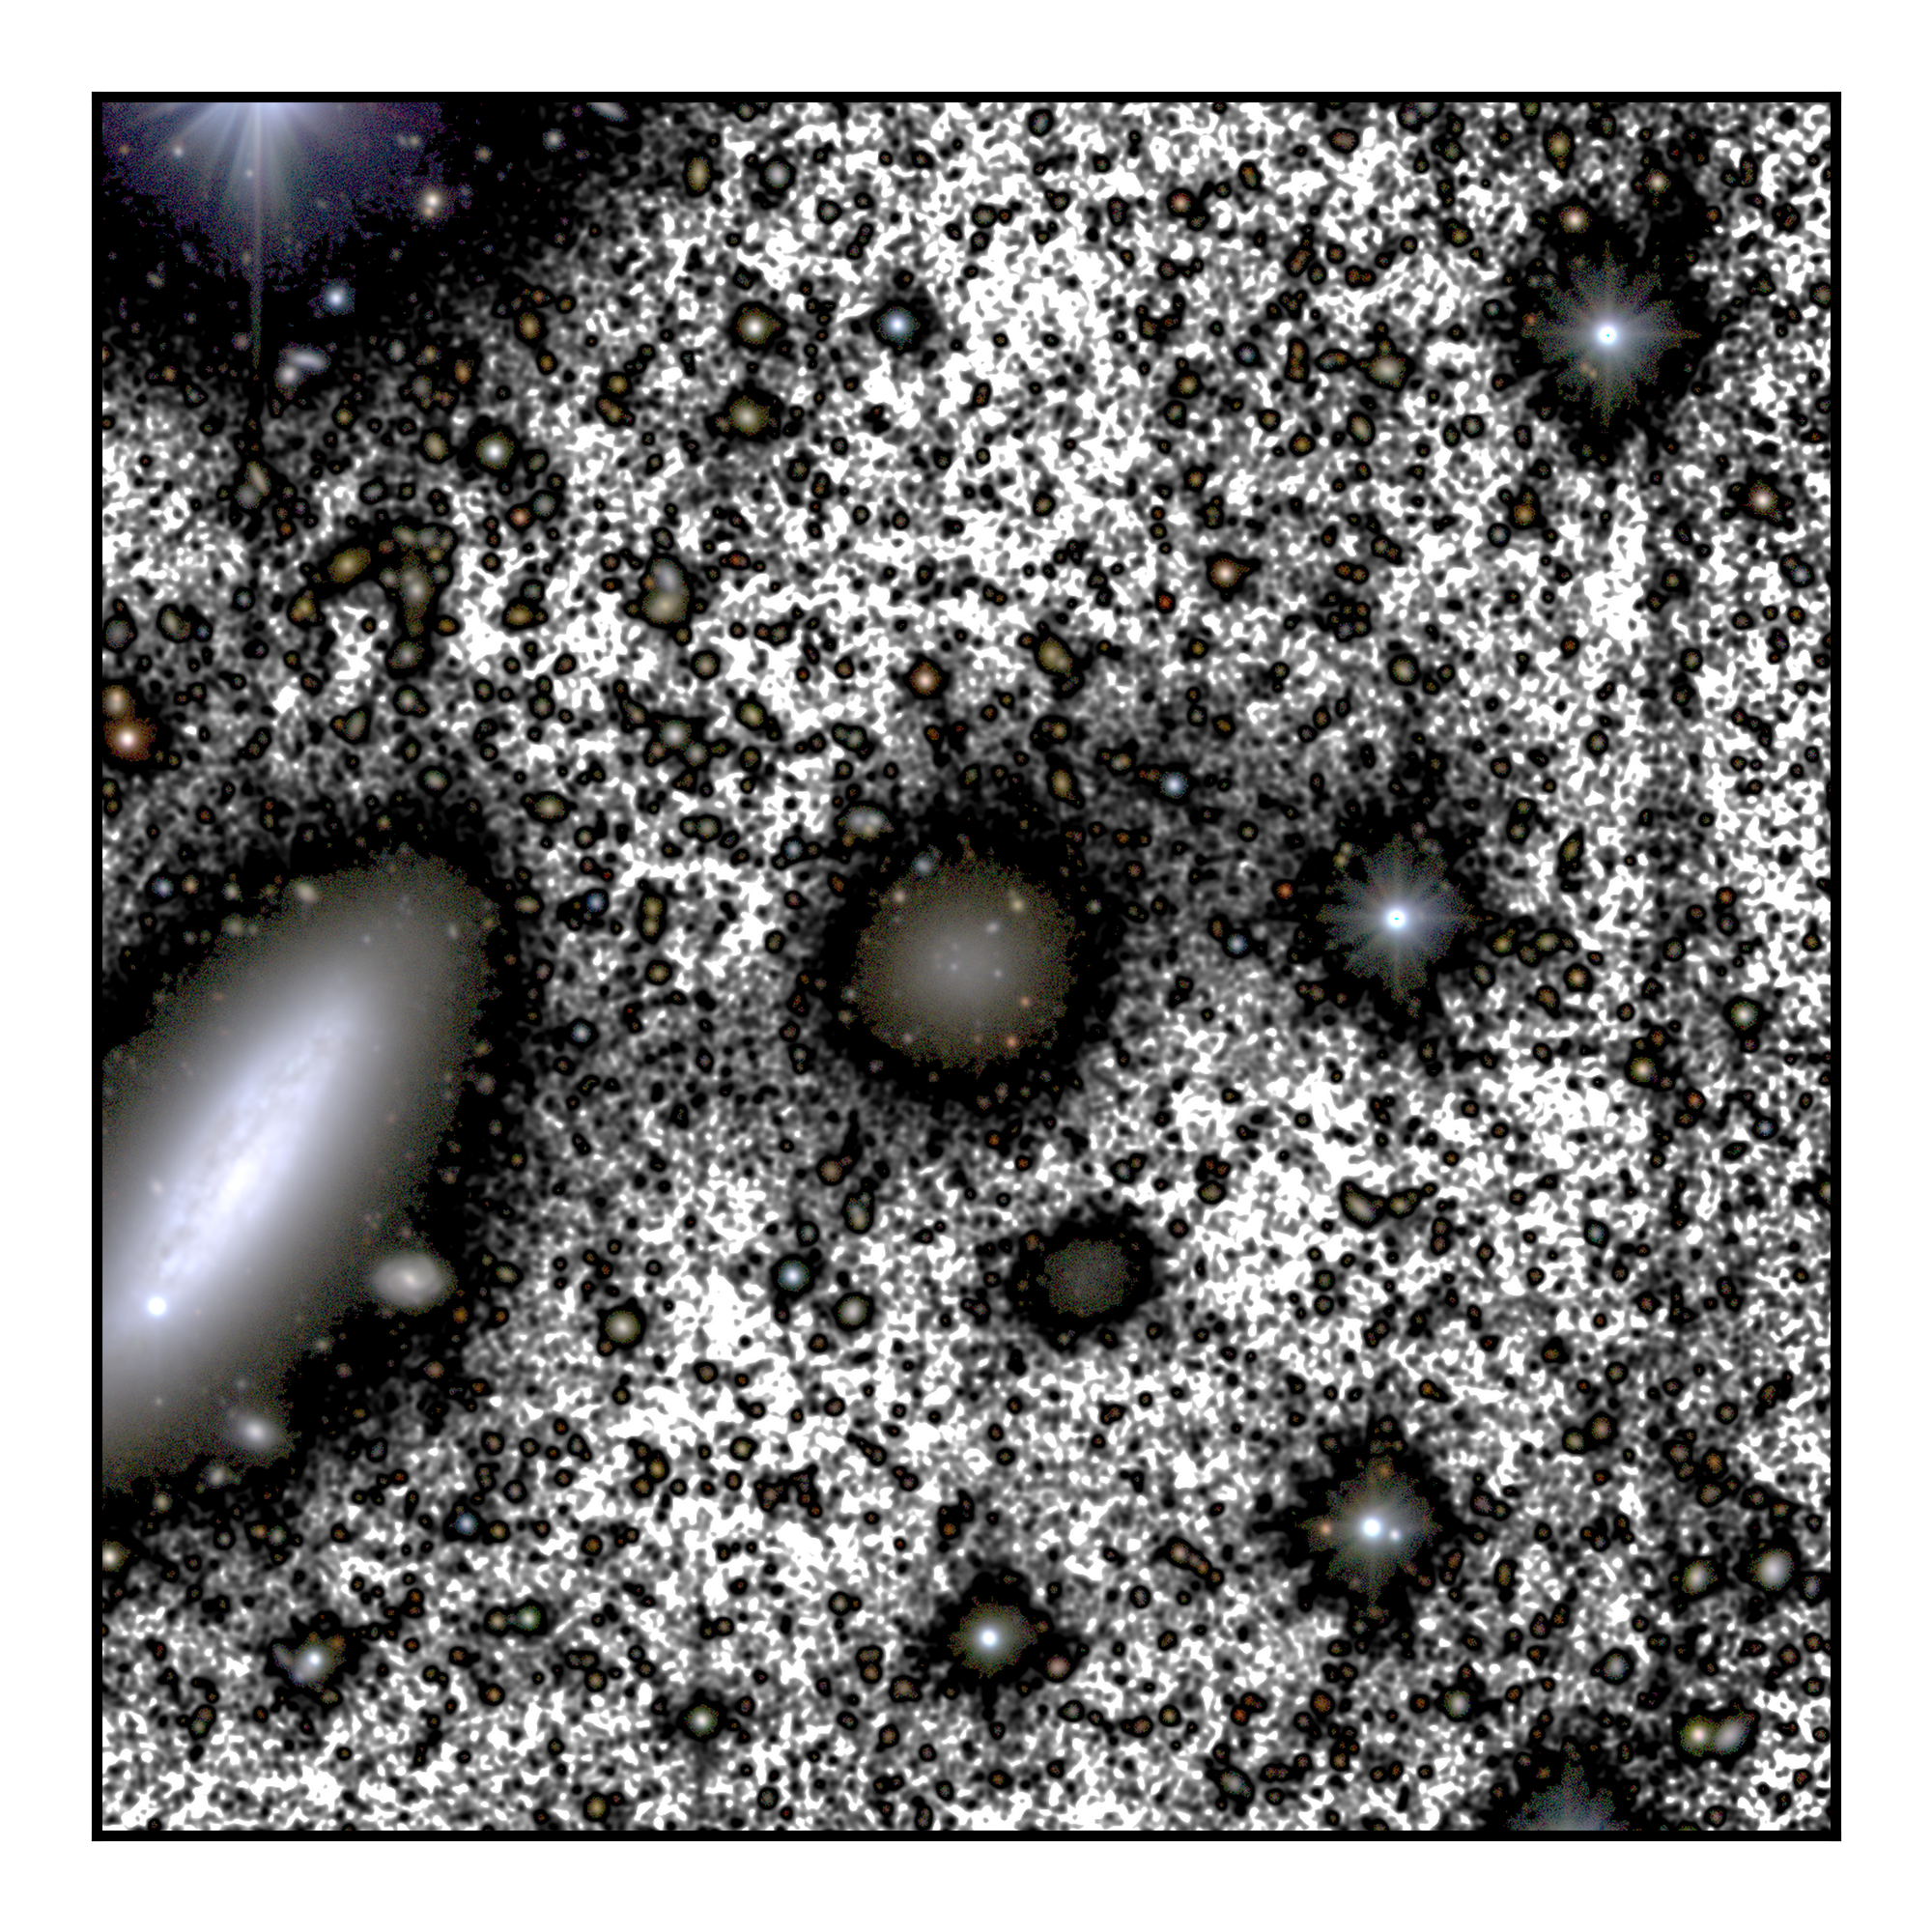

Region around Galaxy NGC1052-DF4

This image presents the region around the galaxy NGC 1052-DF4, taken by the IAC80 telescope at the Teide Observatory in Tenerife. The figure highlights the main galaxies in the field-of-view, including NGC 1052-DF4 (center of the image), and its neighbor NGC 1035 (center left).

Credit: M. Montes et al.